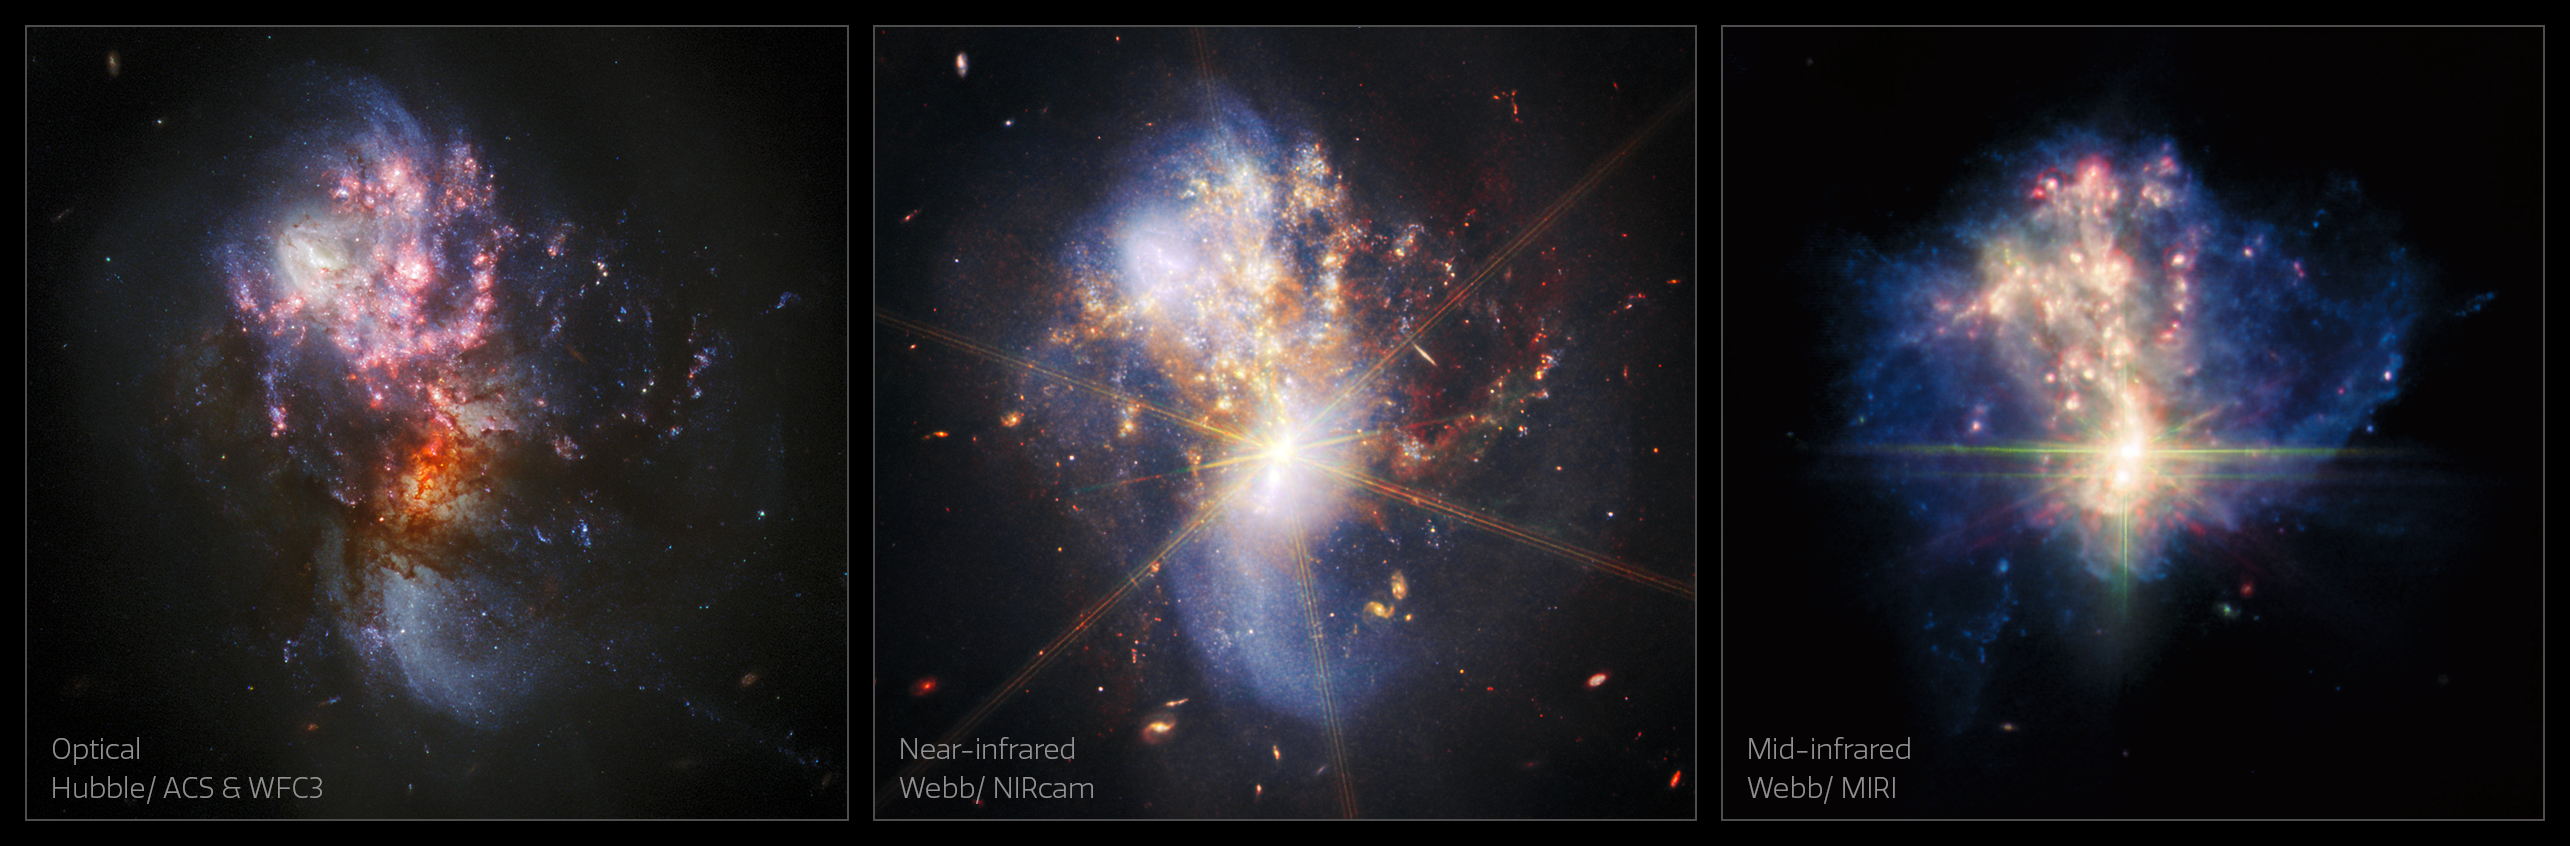

Webb Explores a Pair of Merging Galaxies

Here, the Webb Picture of the Month of merging galaxies IC 1623 A and B is juxtaposed with a new image from the NASA/ESA Hubble Space Telescope. In the Webb MIRI image, the bright core, heated gas and dust, and young star forming regions are all visible. The Hubble and Webb NIRCAM images show the galaxies distorted spiral arms, while MIRI reveals the faint ghostly glow of interstellar dust.

Credit: ESA/Webb, NASA & CSA, L. Armus & A. Evans
Acknowledgement: R. Colombari